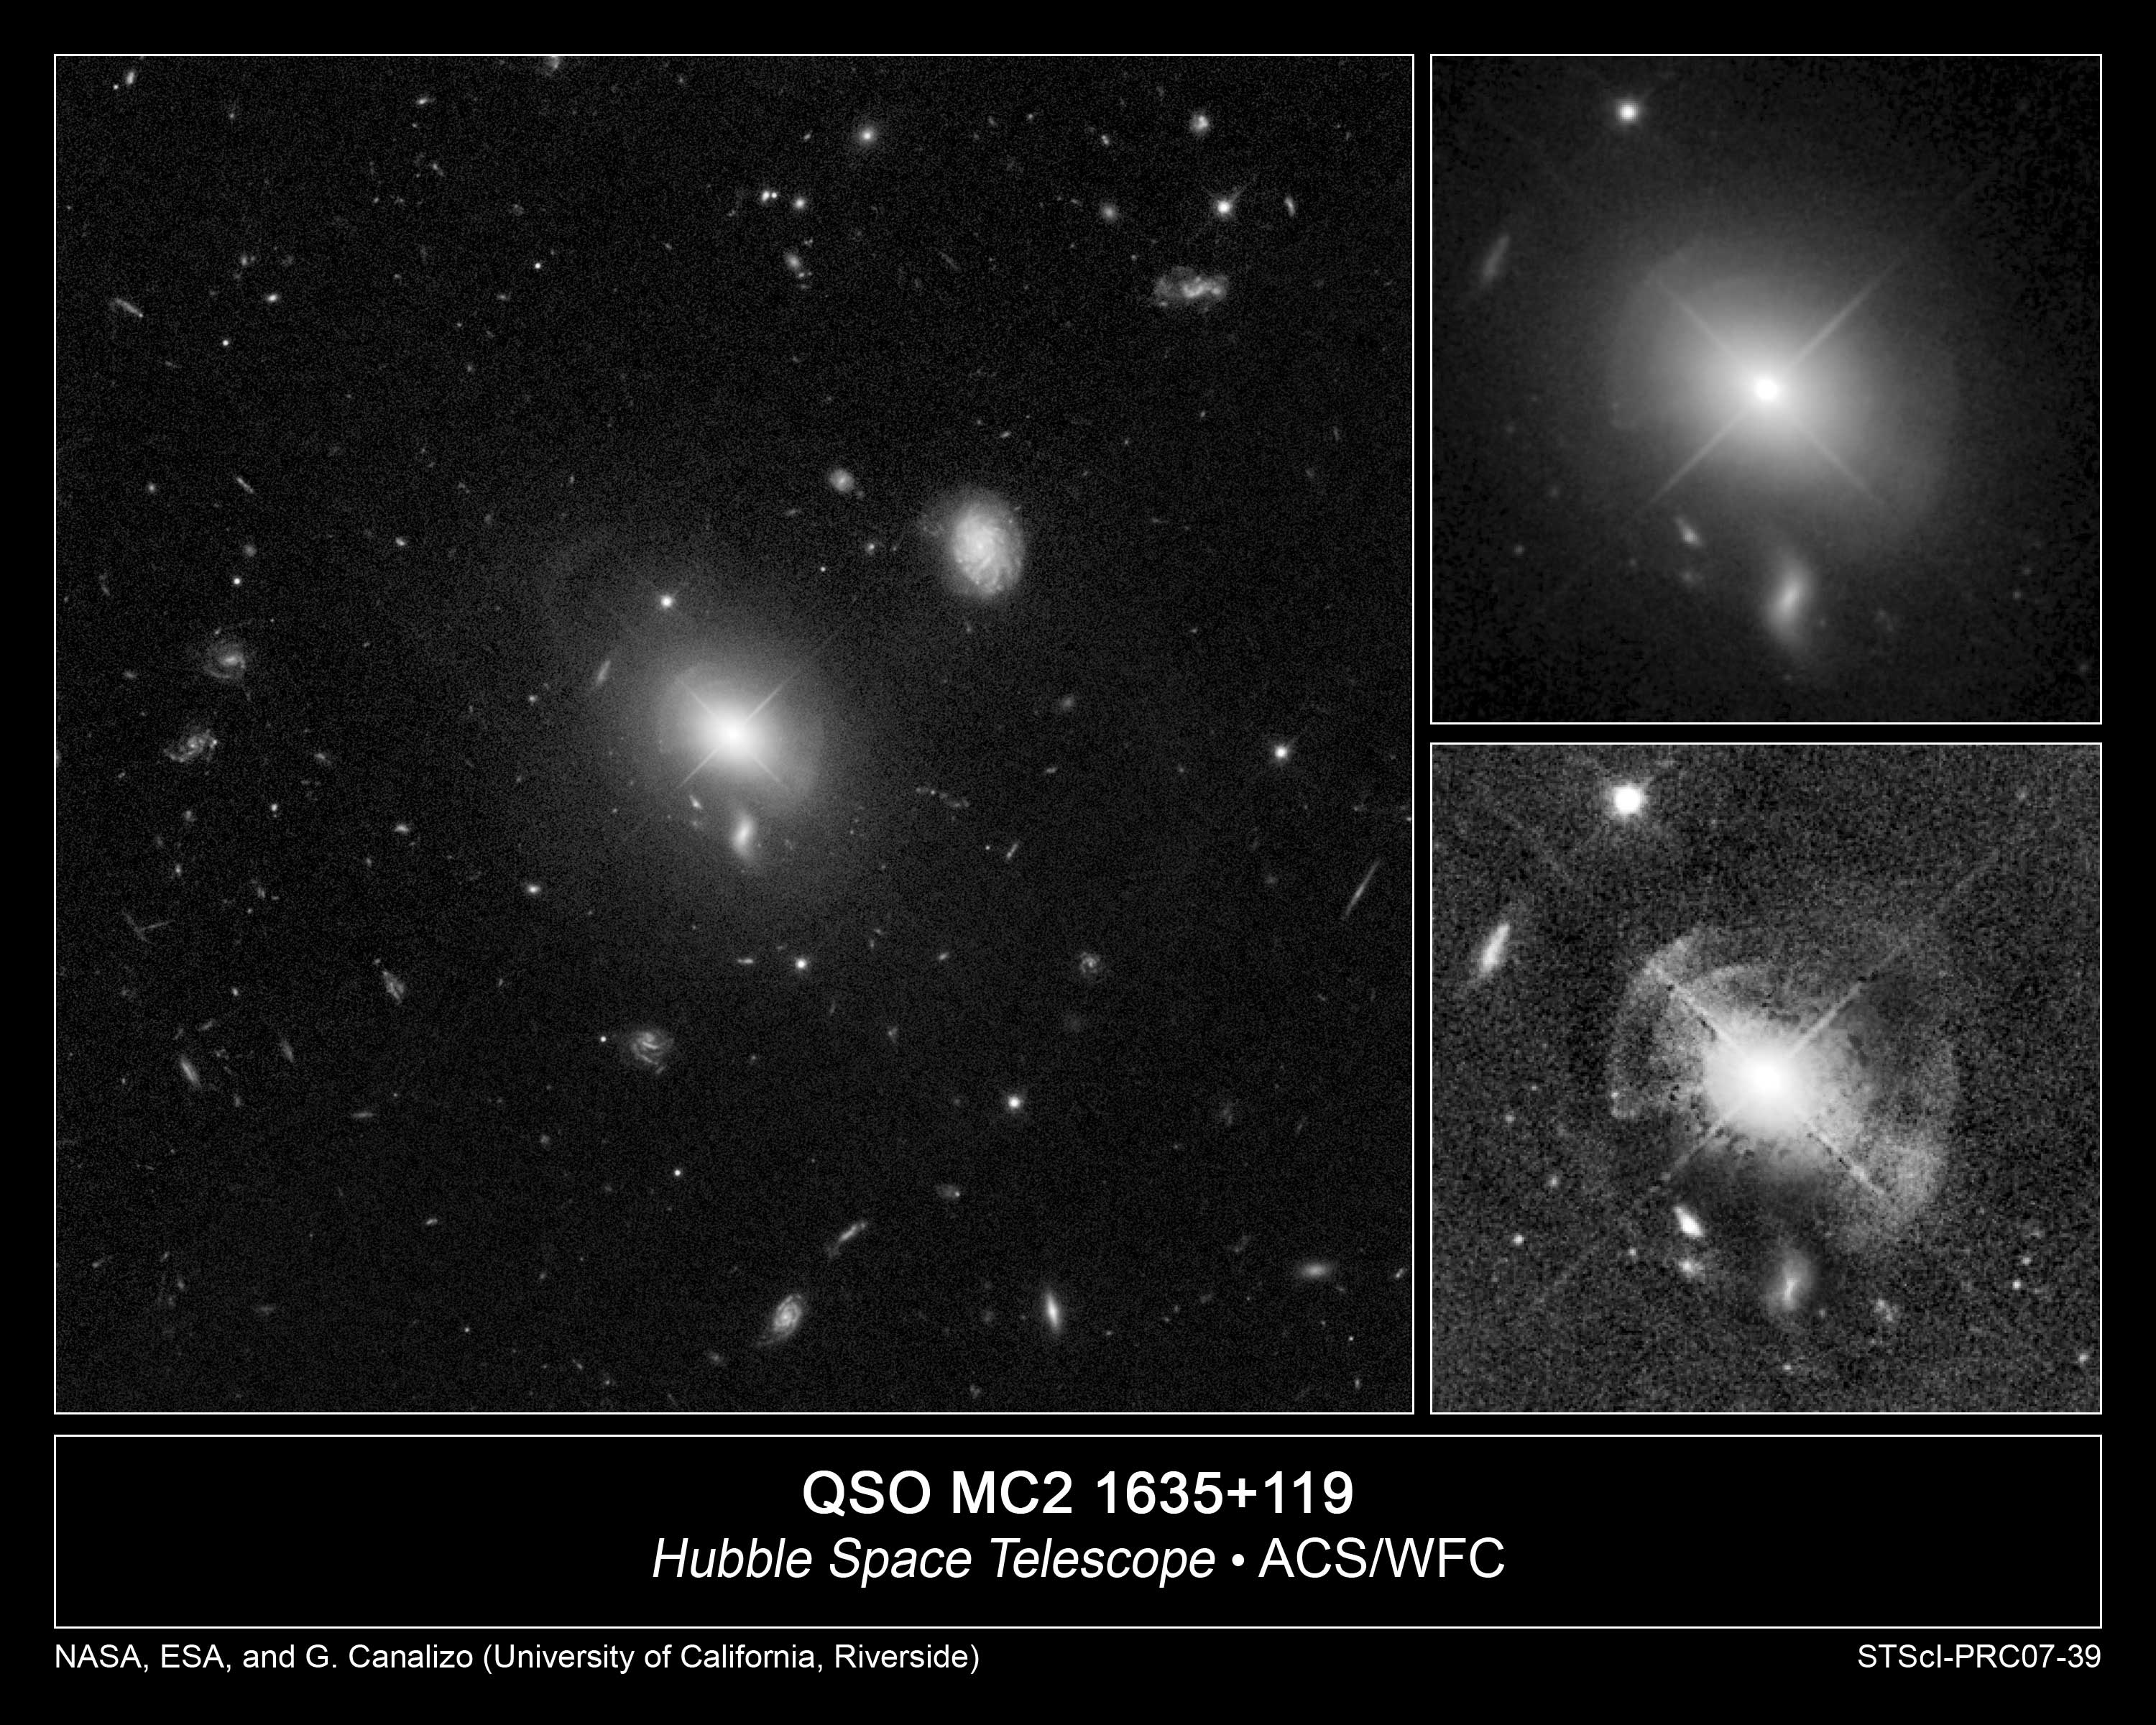

Hubble spies shells of sparkling stars around quasar

These sharp images taken with the NASA/ESA Hubble Space Telescope reveal at least five shells of stars surrounding a brilliant quasar at the heart of a giant elliptical galaxy. The image at left shows the quasar, known as MC2 1635+119, and its host galaxy [centre] against a backdrop of distant galaxies.

In the image at top, right, the shells can barely be seen because of the bright light from the central quasar.

The image at bottom, right, was enhanced to reveal details of the faint shells. In both right-hand images, the objects below and to the left of the shells are background galaxies. A foreground star resides at top, left.

The shells have never been seen before in this galaxy, located about 2 billion light-years away. They are evidence that the giant galaxy clashed with another galaxy in the relatively recent past. The shells are similar to ripples forming in a pond when a stone is tossed in. They sparkle with stars that were swept up from the encounter.The interaction may be providing enough fuel to power the quasar, which dominates the galaxy's centre. This observation supports the idea that quasars are born from mergers between galaxies.

The images were taken June 28 and July 4, 2005 with Hubble's Advanced Camera for Surveys.

The observation team consists of Gabriela Canalizo and Nicola Bennert of the University of California, Riverside; Bruno Jungwiert of the University of California, Riverside and the Academy of Sciences of the Czech Republic, Prague; Alan Stockton of the University of Hawaii, Honolulu; Francois Schweizer of the Carnegie Observatories, Pasadena; Mark Lacy of the California Institute of Technology, Pasadena; and Chien Peng of the Space Telescope Science Institute, Baltimore.

Credit: NASA, ESA, and G. Canalizo (University of California, Riverside)

Credit: NASA & ESA